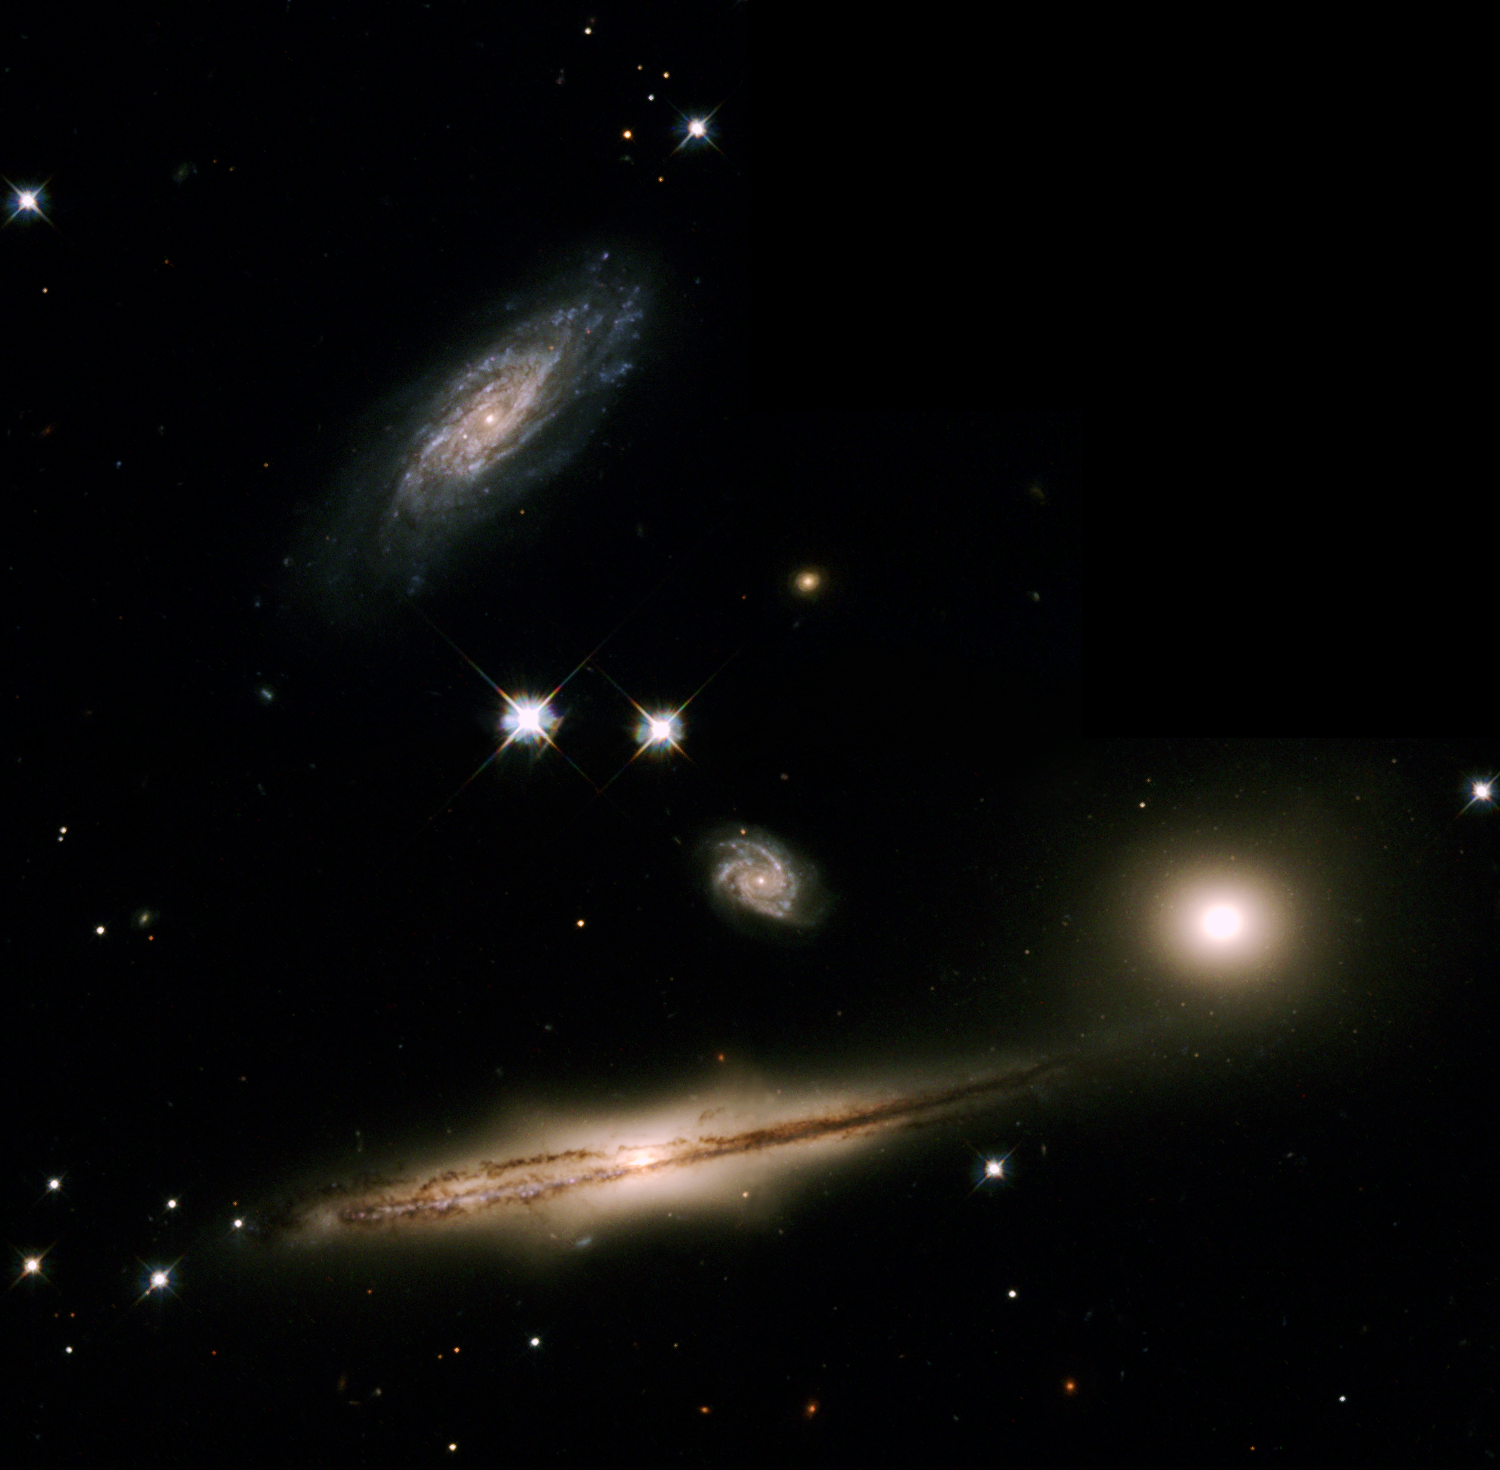

A Minuet of Galaxies

This troupe of four galaxies, known as Hickson Compact Group 87 (HCG 87), is performing an intricate dance orchestrated by the mutual gravitational forces acting between them. The dance is a slow, graceful minuet, occurring over a time span of hundreds of millions of years.

Credit: The Hubble Heritage Team (AURA/STScI/NASA/ESA)